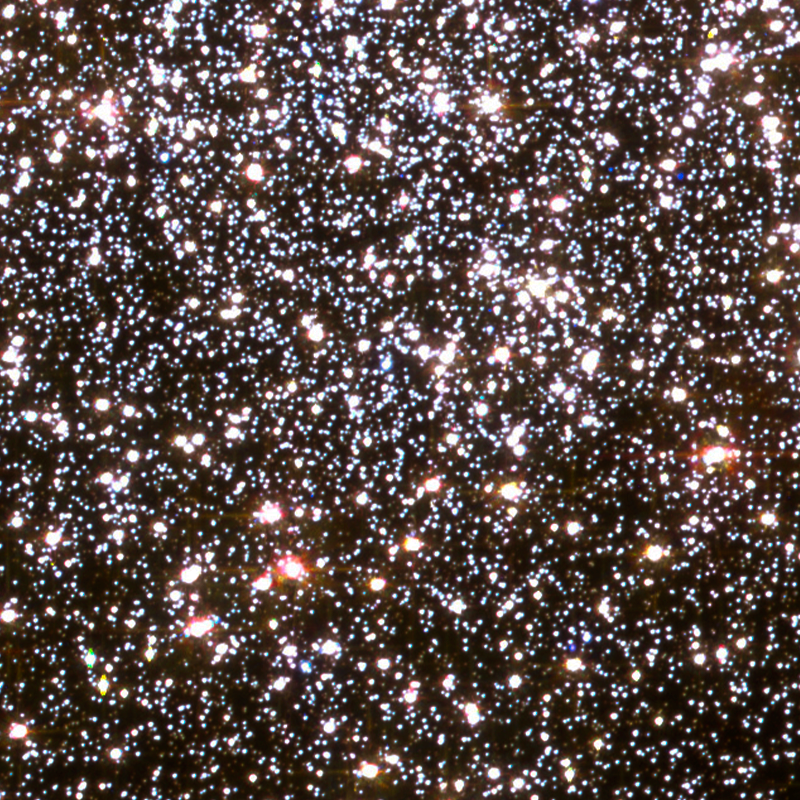

Central regions of 47 Tucanae

This NASA/ESA Hubble Space Telescope image shows the central region of a globular cluster known as NGC 104 — or, more commonly, 47 Tucanae, since it is part of the constellation of Tucana (The Toucan) in the southern sky.

Credit: NASA, ESA, and the Hubble Heritage (STScI/AURA)-ESA/Hubble Collaboration Acknowledgment: J. Mack (STScI) and G. Piotto (University of Padova, Italy)